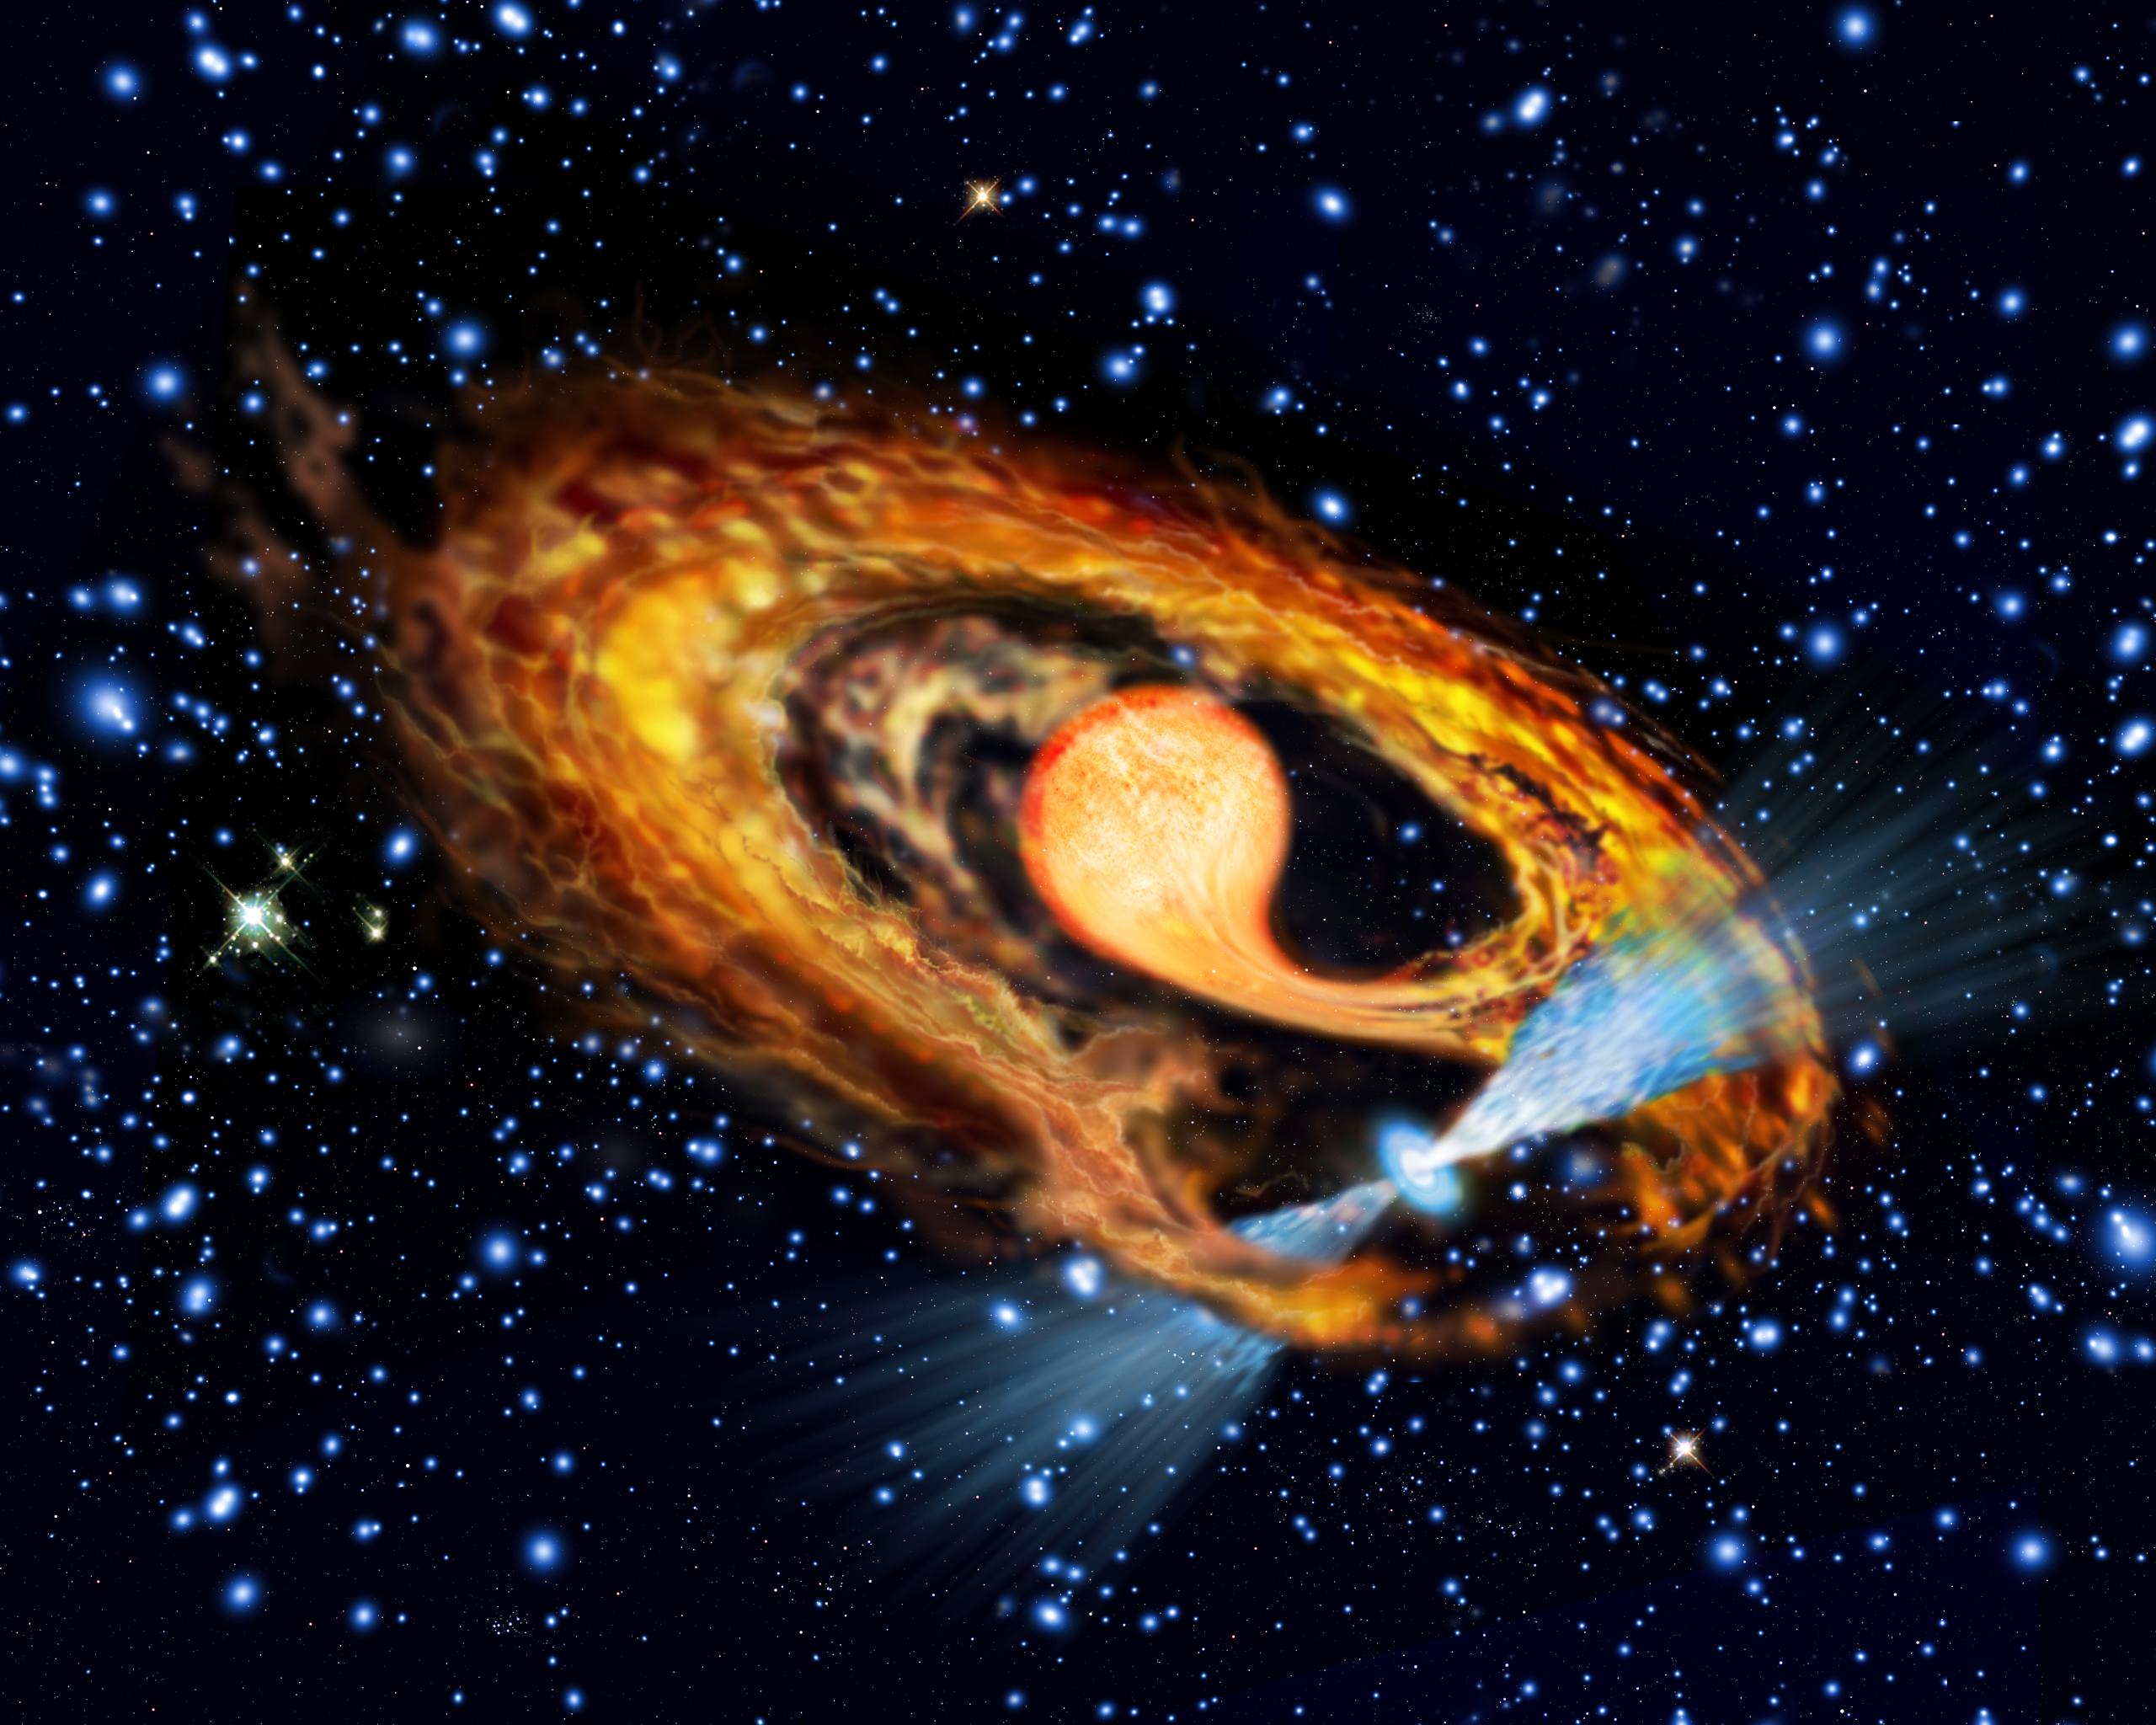

Artist's impression of millisecond pulsar and companion

The artist's impression shows the pulsar (seen in blue with two radiation beams) and its bloated red companion star in the globular cluster NGC 6397. Scientists believe that the best explanation for seeing a bloated red star instead of a 'quiet' white dwarf in the system is that the pulsar only recently has been spun up to its current rotation speed of 274 times per second by the gases transferred by the red star. It is the first time such a system has been observed.

Credit: European Space Agency & Francesco Ferraro (Bologna Astronomical Observatory)